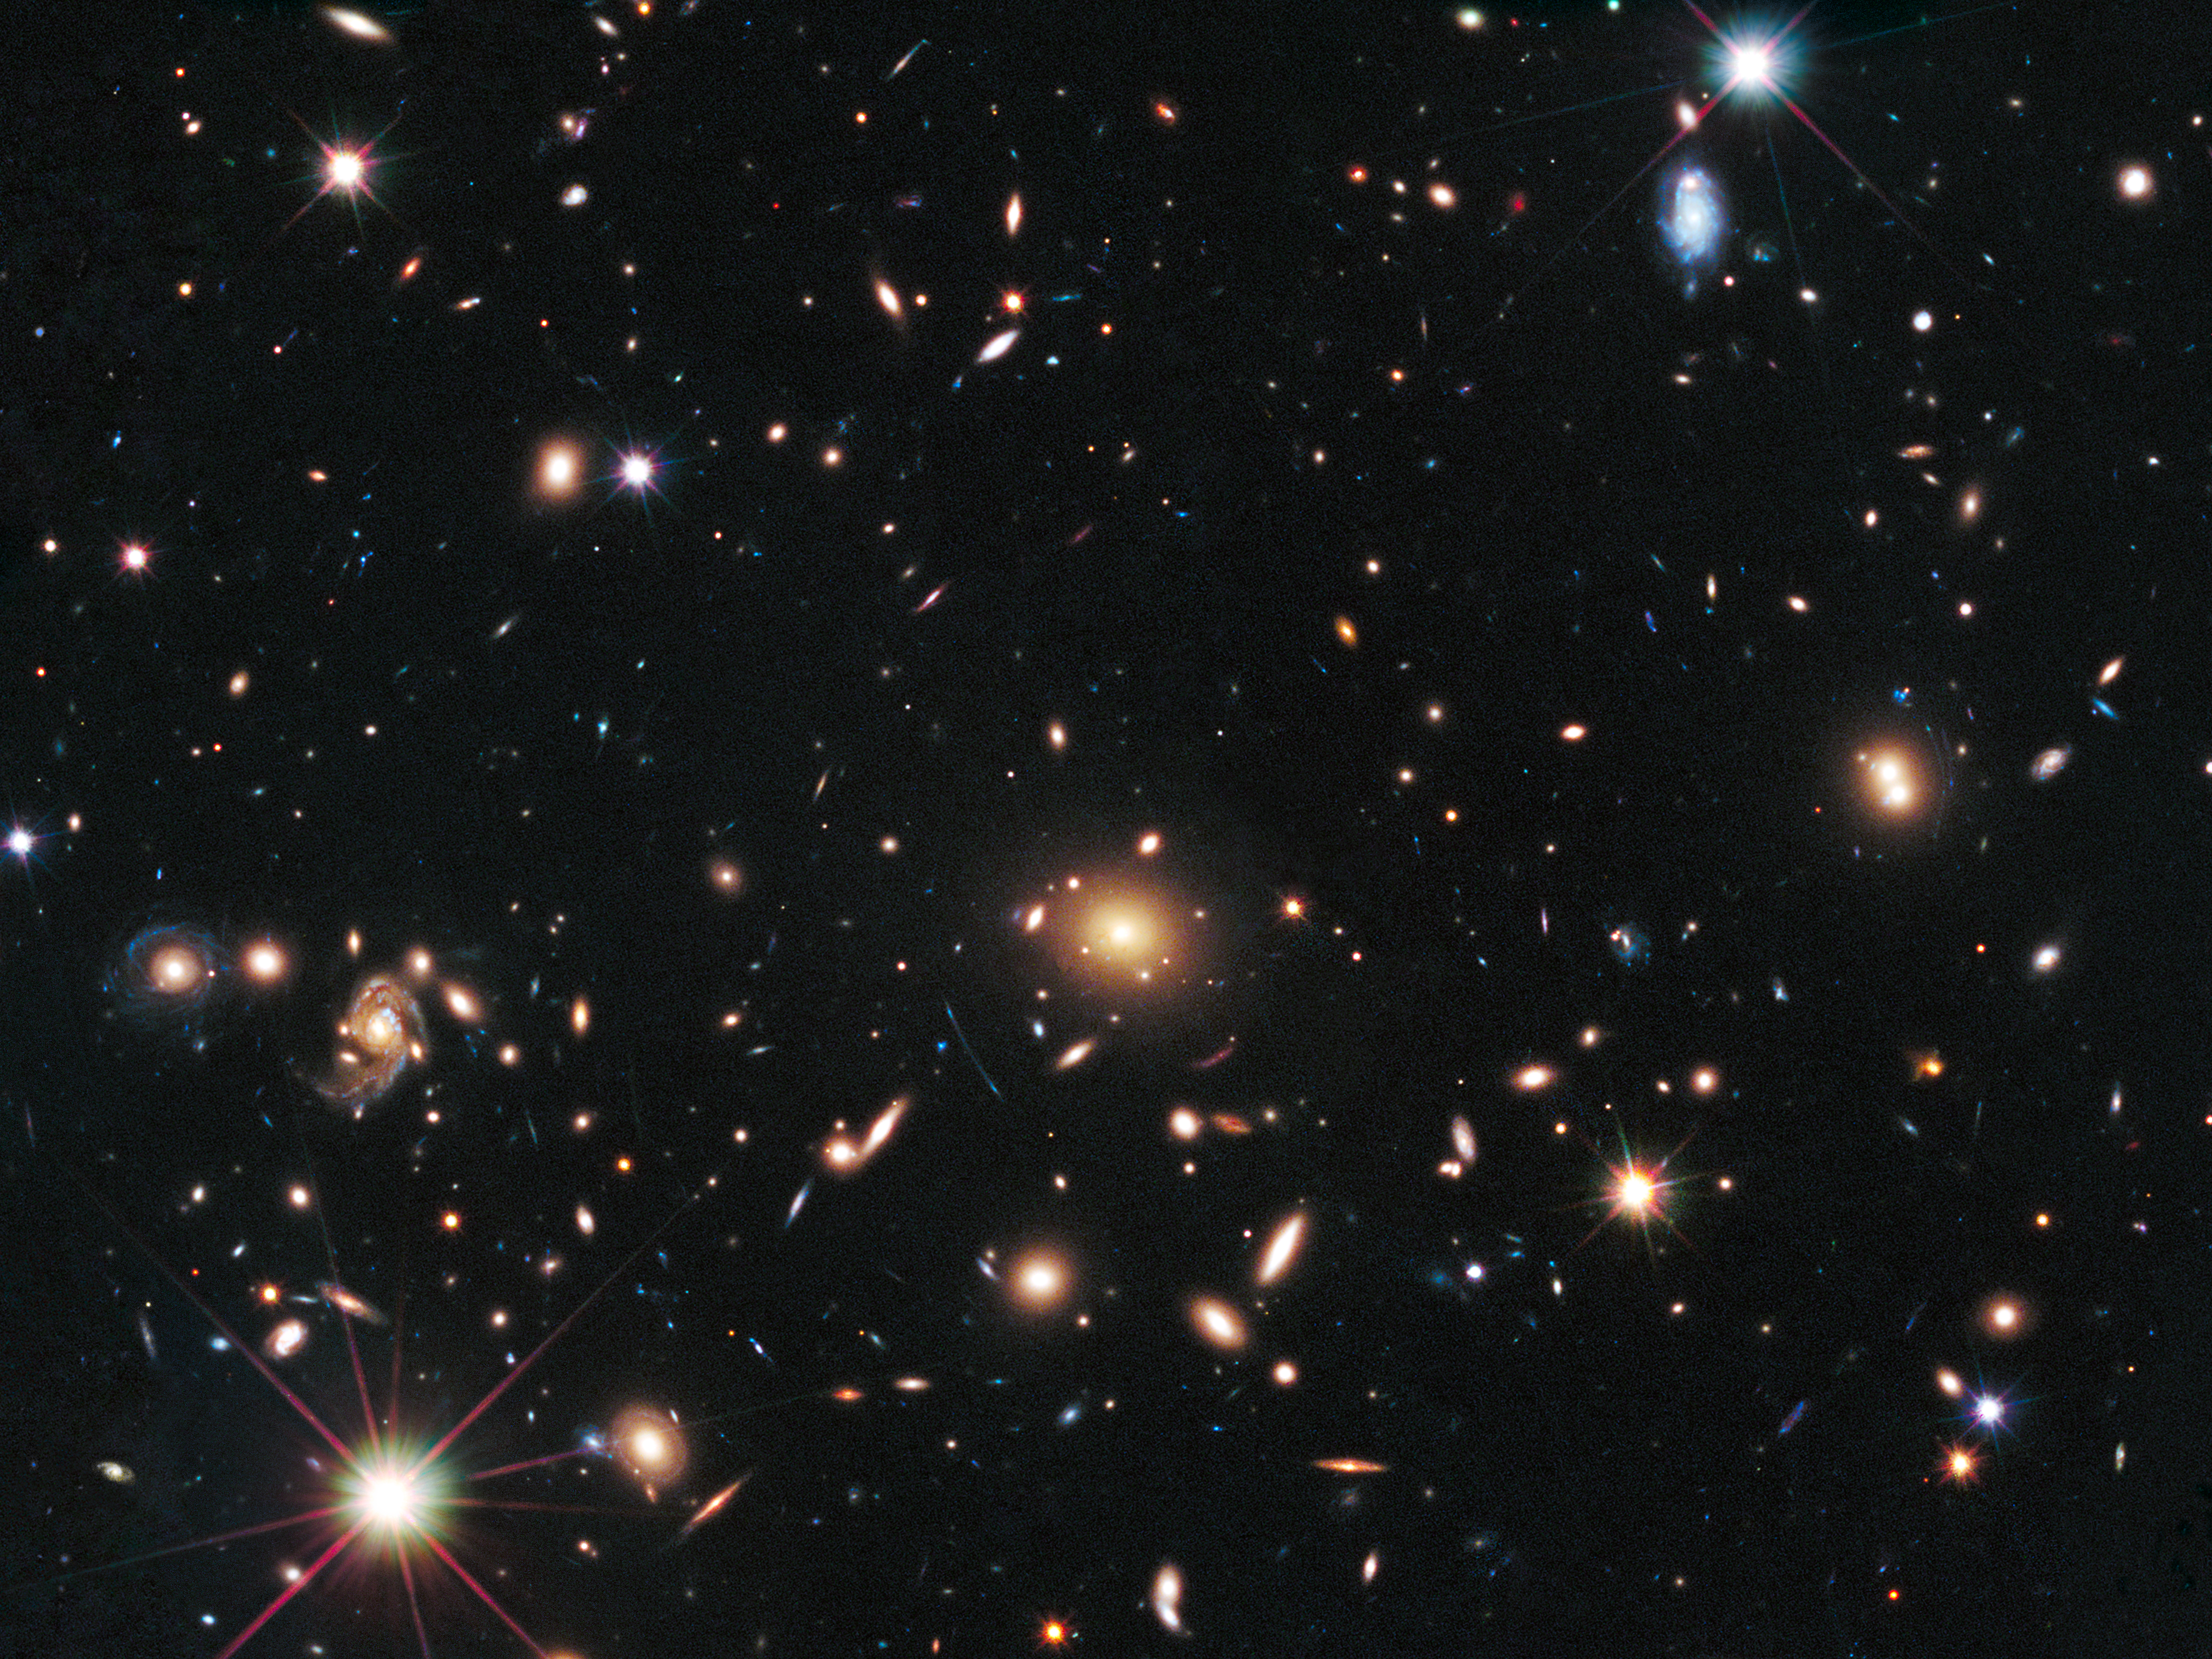

Galaxy cluster MACS J1720+35

The heart of a vast cluster of galaxies called MACSJ1720+35 is shown in this image, taken in visible and near-infrared light by the NASA/ESA Hubble Space Telescope.

The galaxy cluster is so massive that its gravity distorts, brightens, and magnifies light from more distant objects behind it, an effect called gravitational lensing. In the top right an exploding star nicknamed Caracalla and located behind the cluster can just be made out.

The supernova is a member of a special class of exploding star called Type Ia, prized by astronomers because it provides a consistent level of peak brightness that makes it reliable for making distance estimates.

Finding a gravitationally lensed Type Ia supernova gives astronomers a unique opportunity to check the optical "prescription" of the foreground lensing cluster. The supernova is one of three exploding stars discovered in the Cluster Lensing And Supernova survey with Hubble (CLASH), and was followed up as part of a Supernova Cosmology Project HST program. CLASH is a Hubble census that probed the distribution of dark matter in 25 galaxy clusters. Dark matter cannot be seen directly but is believed to make up most of the universe's matter.

The image of the galaxy cluster was taken between March and July 2012 by Hubble's Wide Field Camera 3 and Advanced Camera for Surveys.

Credit: NASA, ESA, S. Perlmutter (UC Berkeley, LBNL), A. Koekemoer (STScI), M. Postman (STScI), A. Riess (STScI/JHU), J. Nordin (LBNL, UC Berkeley), D. Rubin (Florida State), and C. McCully (Rutgers University)